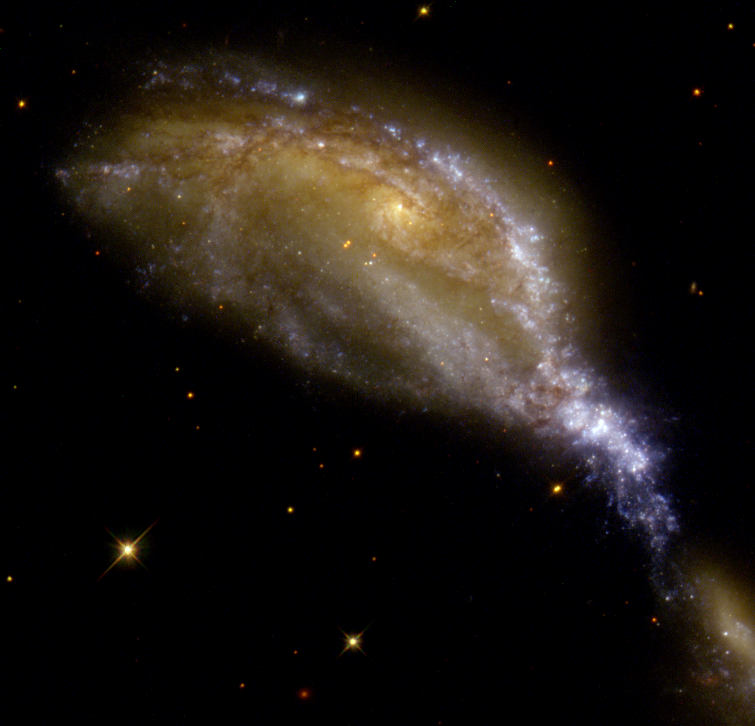

Galaxy collision in NGC 6745

What appears as a bird's head, leaning over to snatch up a tasty meal, is a striking example of a galaxy collision in NGC 6745. A large spiral galaxy, with its nucleus still intact, peers at the smaller passing galaxy (nearly out of the field of view at lower right), while a bright blue beak and bright whitish-blue top feathers show the distinct path taken during the smaller galaxy's journey. These galaxies did not merely interact gravitationally as they passed one another, they actually collided.

Credit: Roger Lynds (KPNO/NOAO), NASA/ESA and The Hubble Heritage Team (STScI/AURA).